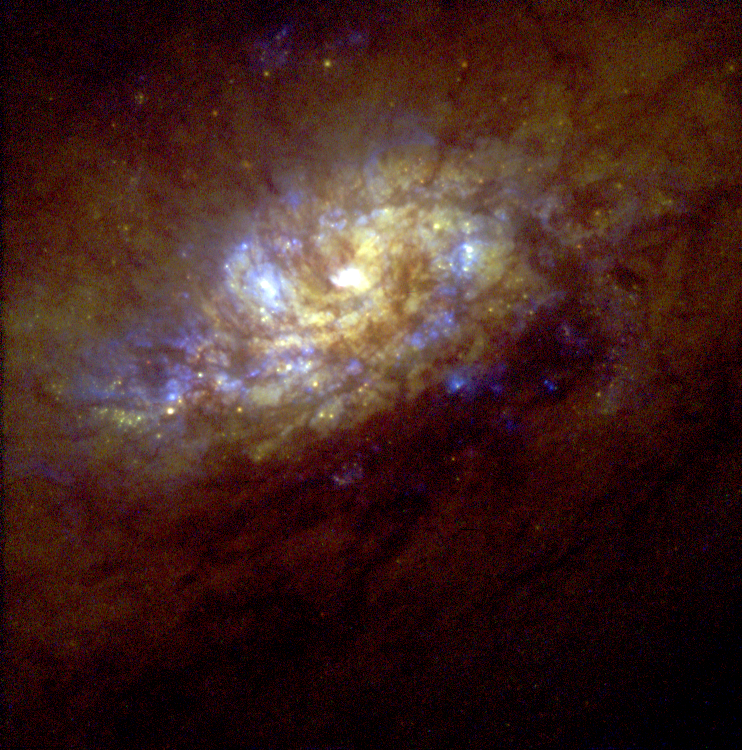

Starburst Galaxy NGC 1808

This image, taken by WFPC2, provides a closer look at the flurry of star birth at the galaxy's core. The star clusters (blue) can be seen (and many more are likely obscured) amid thick lanes of gas and dust. This image shows that stars are often born in compact clusters within star bursts, and that dense gas and dust heavily obscures the star burst region. The brightest knot of star birth seen here is probably a giant cluster of stars, about 100 light-years in diameter, at the very centre of the galaxy. The other star clusters are about 10 to 50 light-years in diameter. The entire star burst region shown here is about 3, 000 light-years across.

Credit: Jim Flood, an amateur astronomer affiliated with Sperry Observatory at Union College in New Jersey, and Max Mutchler, a member of the Space Telescope Science Institute staff who volunteered to work with Jim